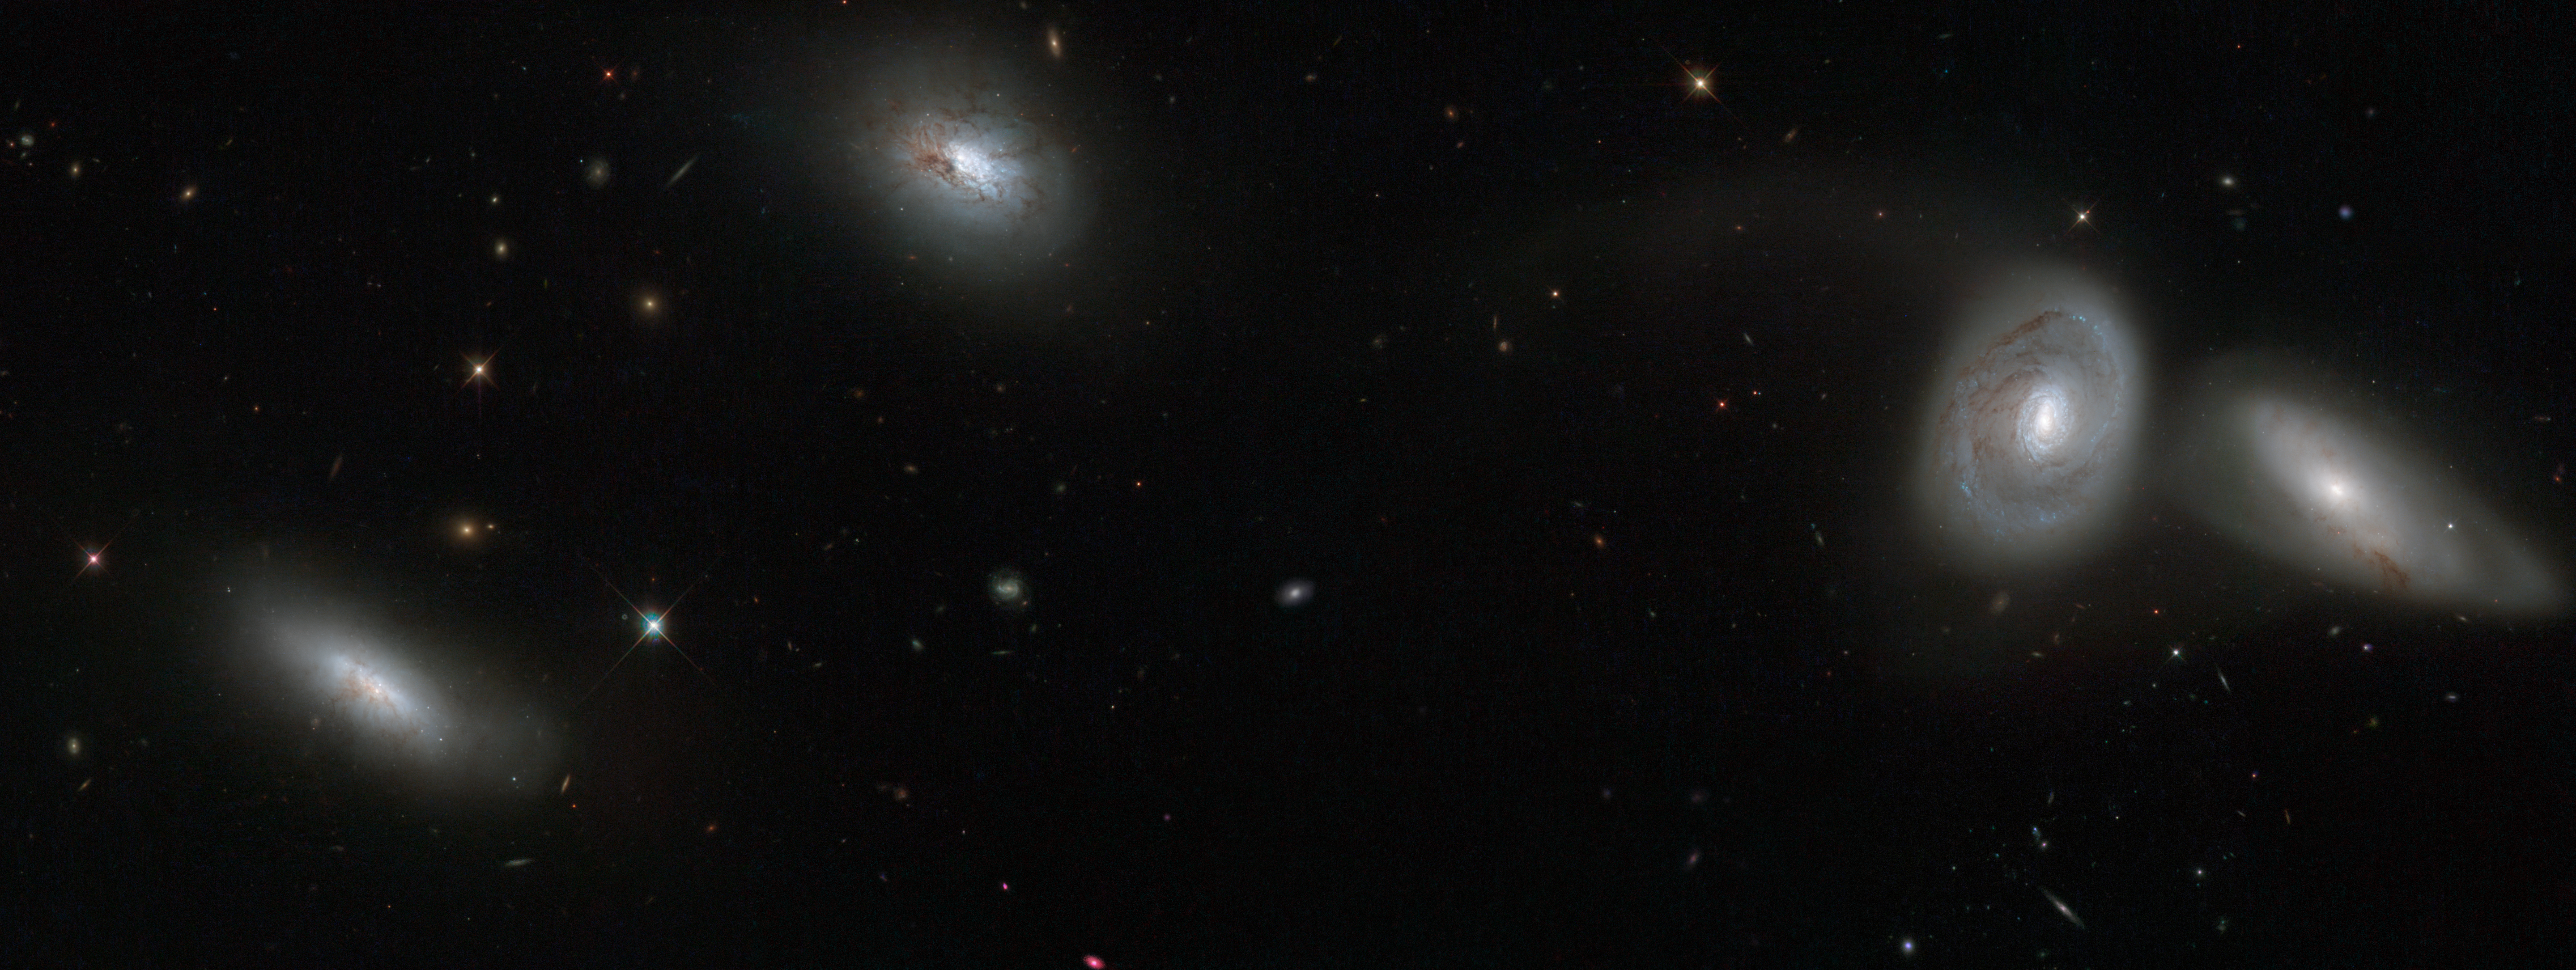

Hubble views bizarre cosmic quartet HCG 16

This new NASA/ESA Hubble Space Telescope image shows four of the seven members of galaxy group HCG 16.

This quartet is composed of (from left to right) NGC 839, NGC 838, NGC 835, and NGC 833 — four of the seven galaxies that make up the entire group. They shine brightly with their glowing golden centres and wispy tails of gas, set against a background dotted with much more distant galaxies.

This new image uses observations from Hubble's Wide Field Planetary Camera 2 combined with data from the ESO Multi-Mode Instrument, installed on the European Southern Observatory's New Technology Telescope in Chile.

Credit: NASA, ESA, ESO
Acknowledgement: Jane Charlton (Pennsylvania State University, USA)